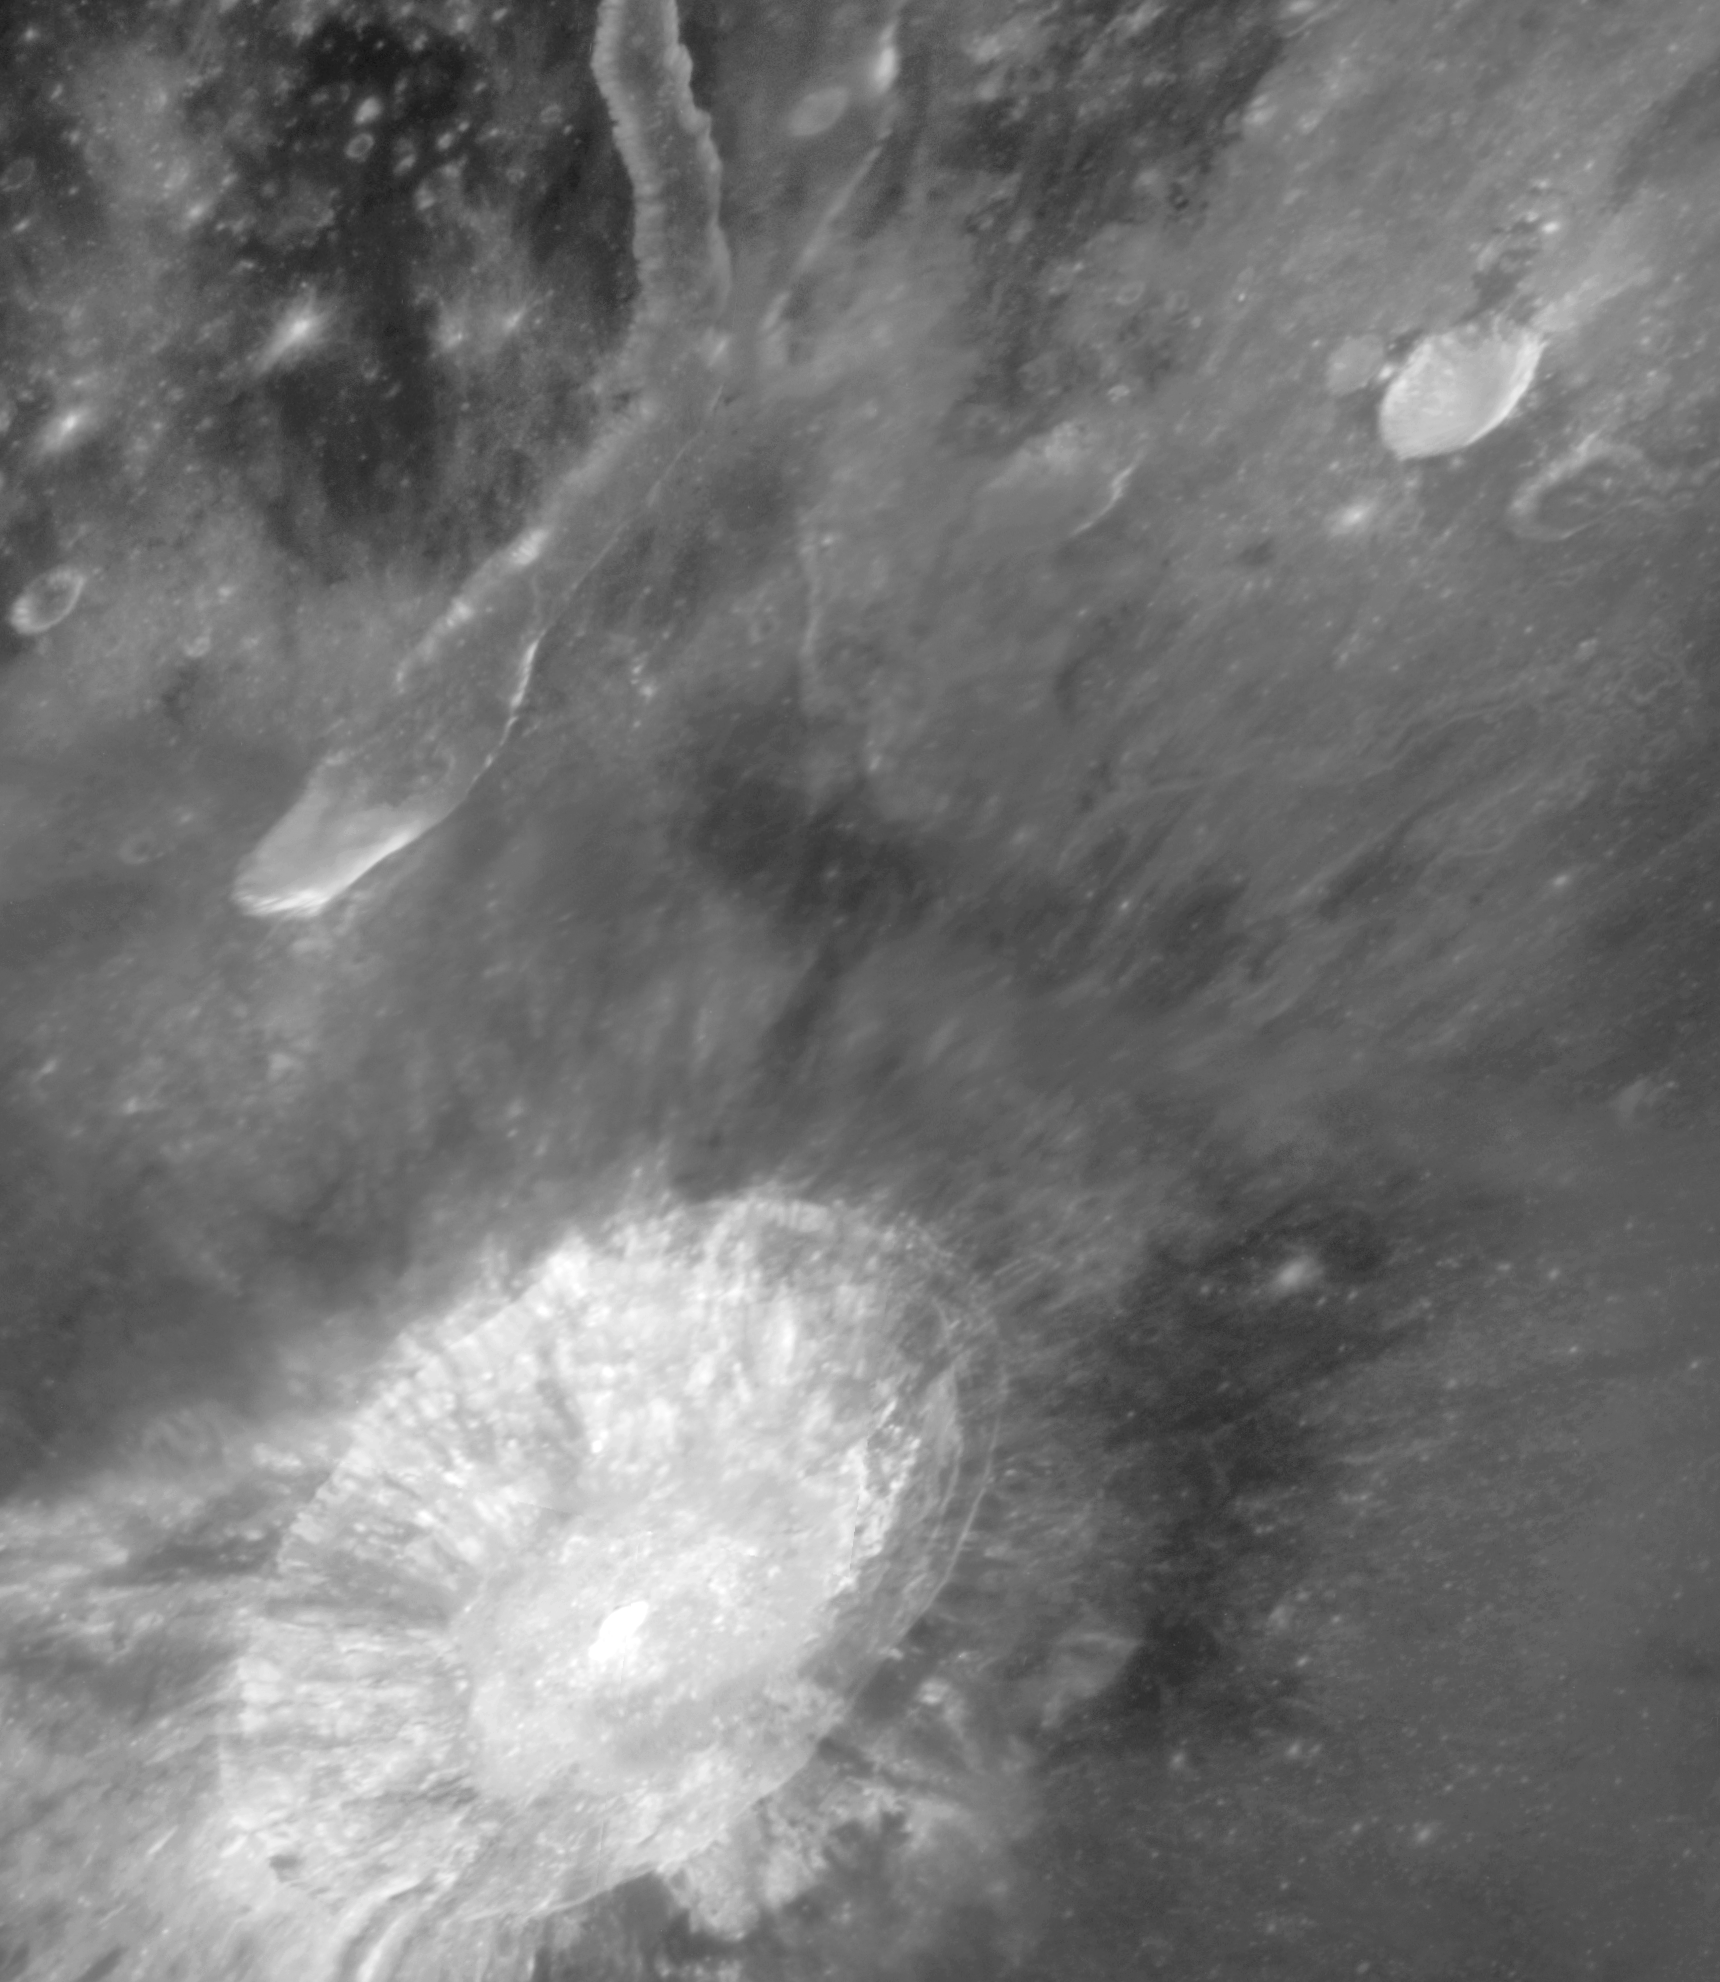

Hubble view of Aristarchus plateau on the Moon

The Hubble Space Telescope Advanced Camera for Surveys imaged Aristarchus crater and nearby Schroter's Valley rille on Aug. 21, 2005. The Hubble images reveal fine-scale details of the crater's interior and exterior in ultraviolet and visible wavelengths at a scale of approximately 50 to 100 metres per picture element.

Credit: NASA, ESA and J. Garvin (NASA/GSFC)